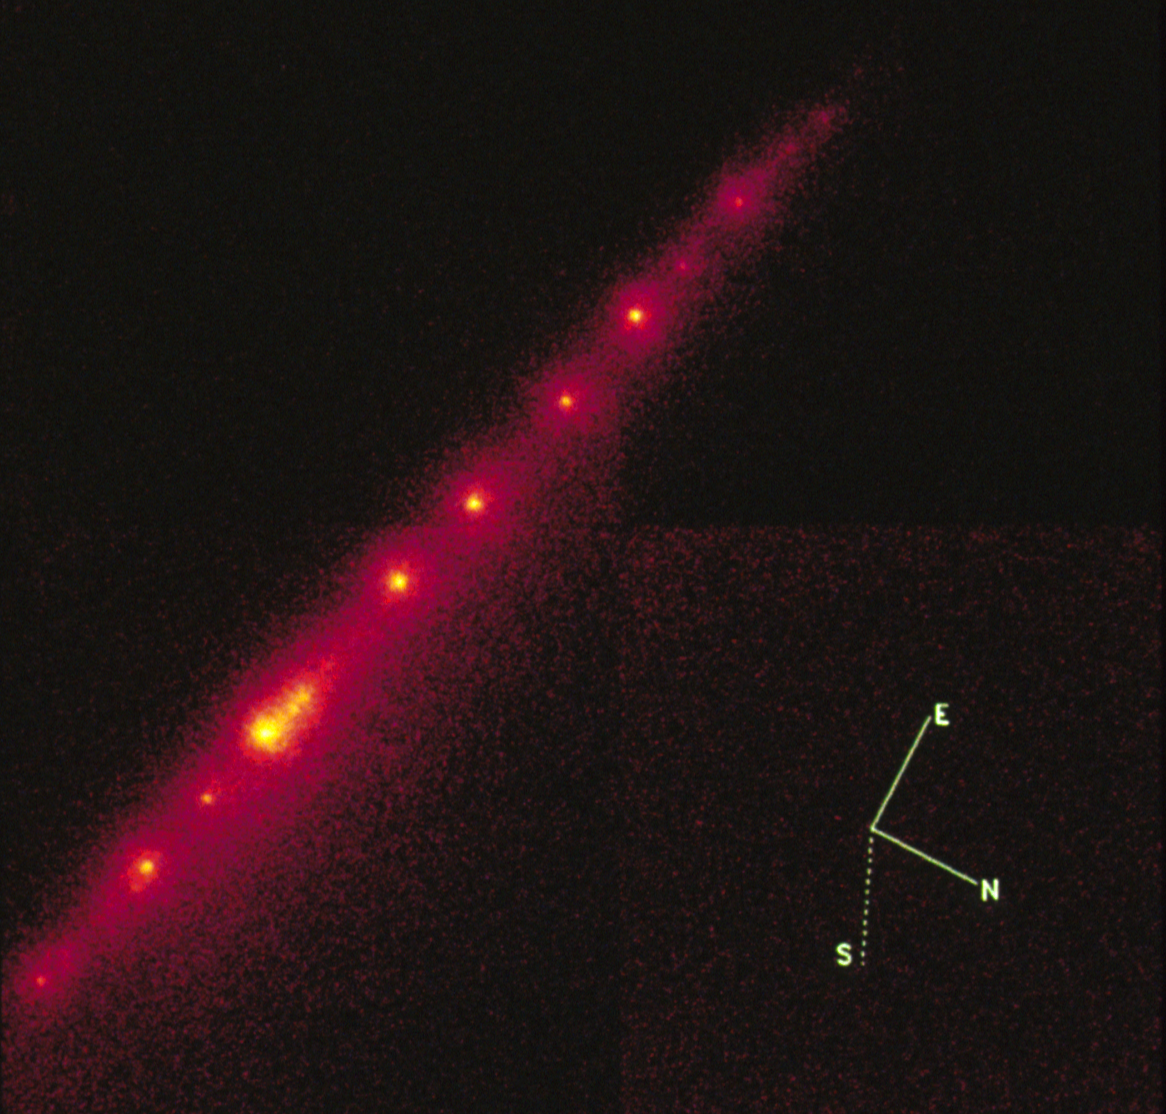

Hubble Telescope Image of the "String of Pearls Comet

Hubble Space Telescope provided a detailed look at the comet P/Shoemaker-Levy 9 before it smashed into Jupiter.

Credit: Dr. H. A. Weaver and Mr. T. E. Smith, STScI NASA/ESA